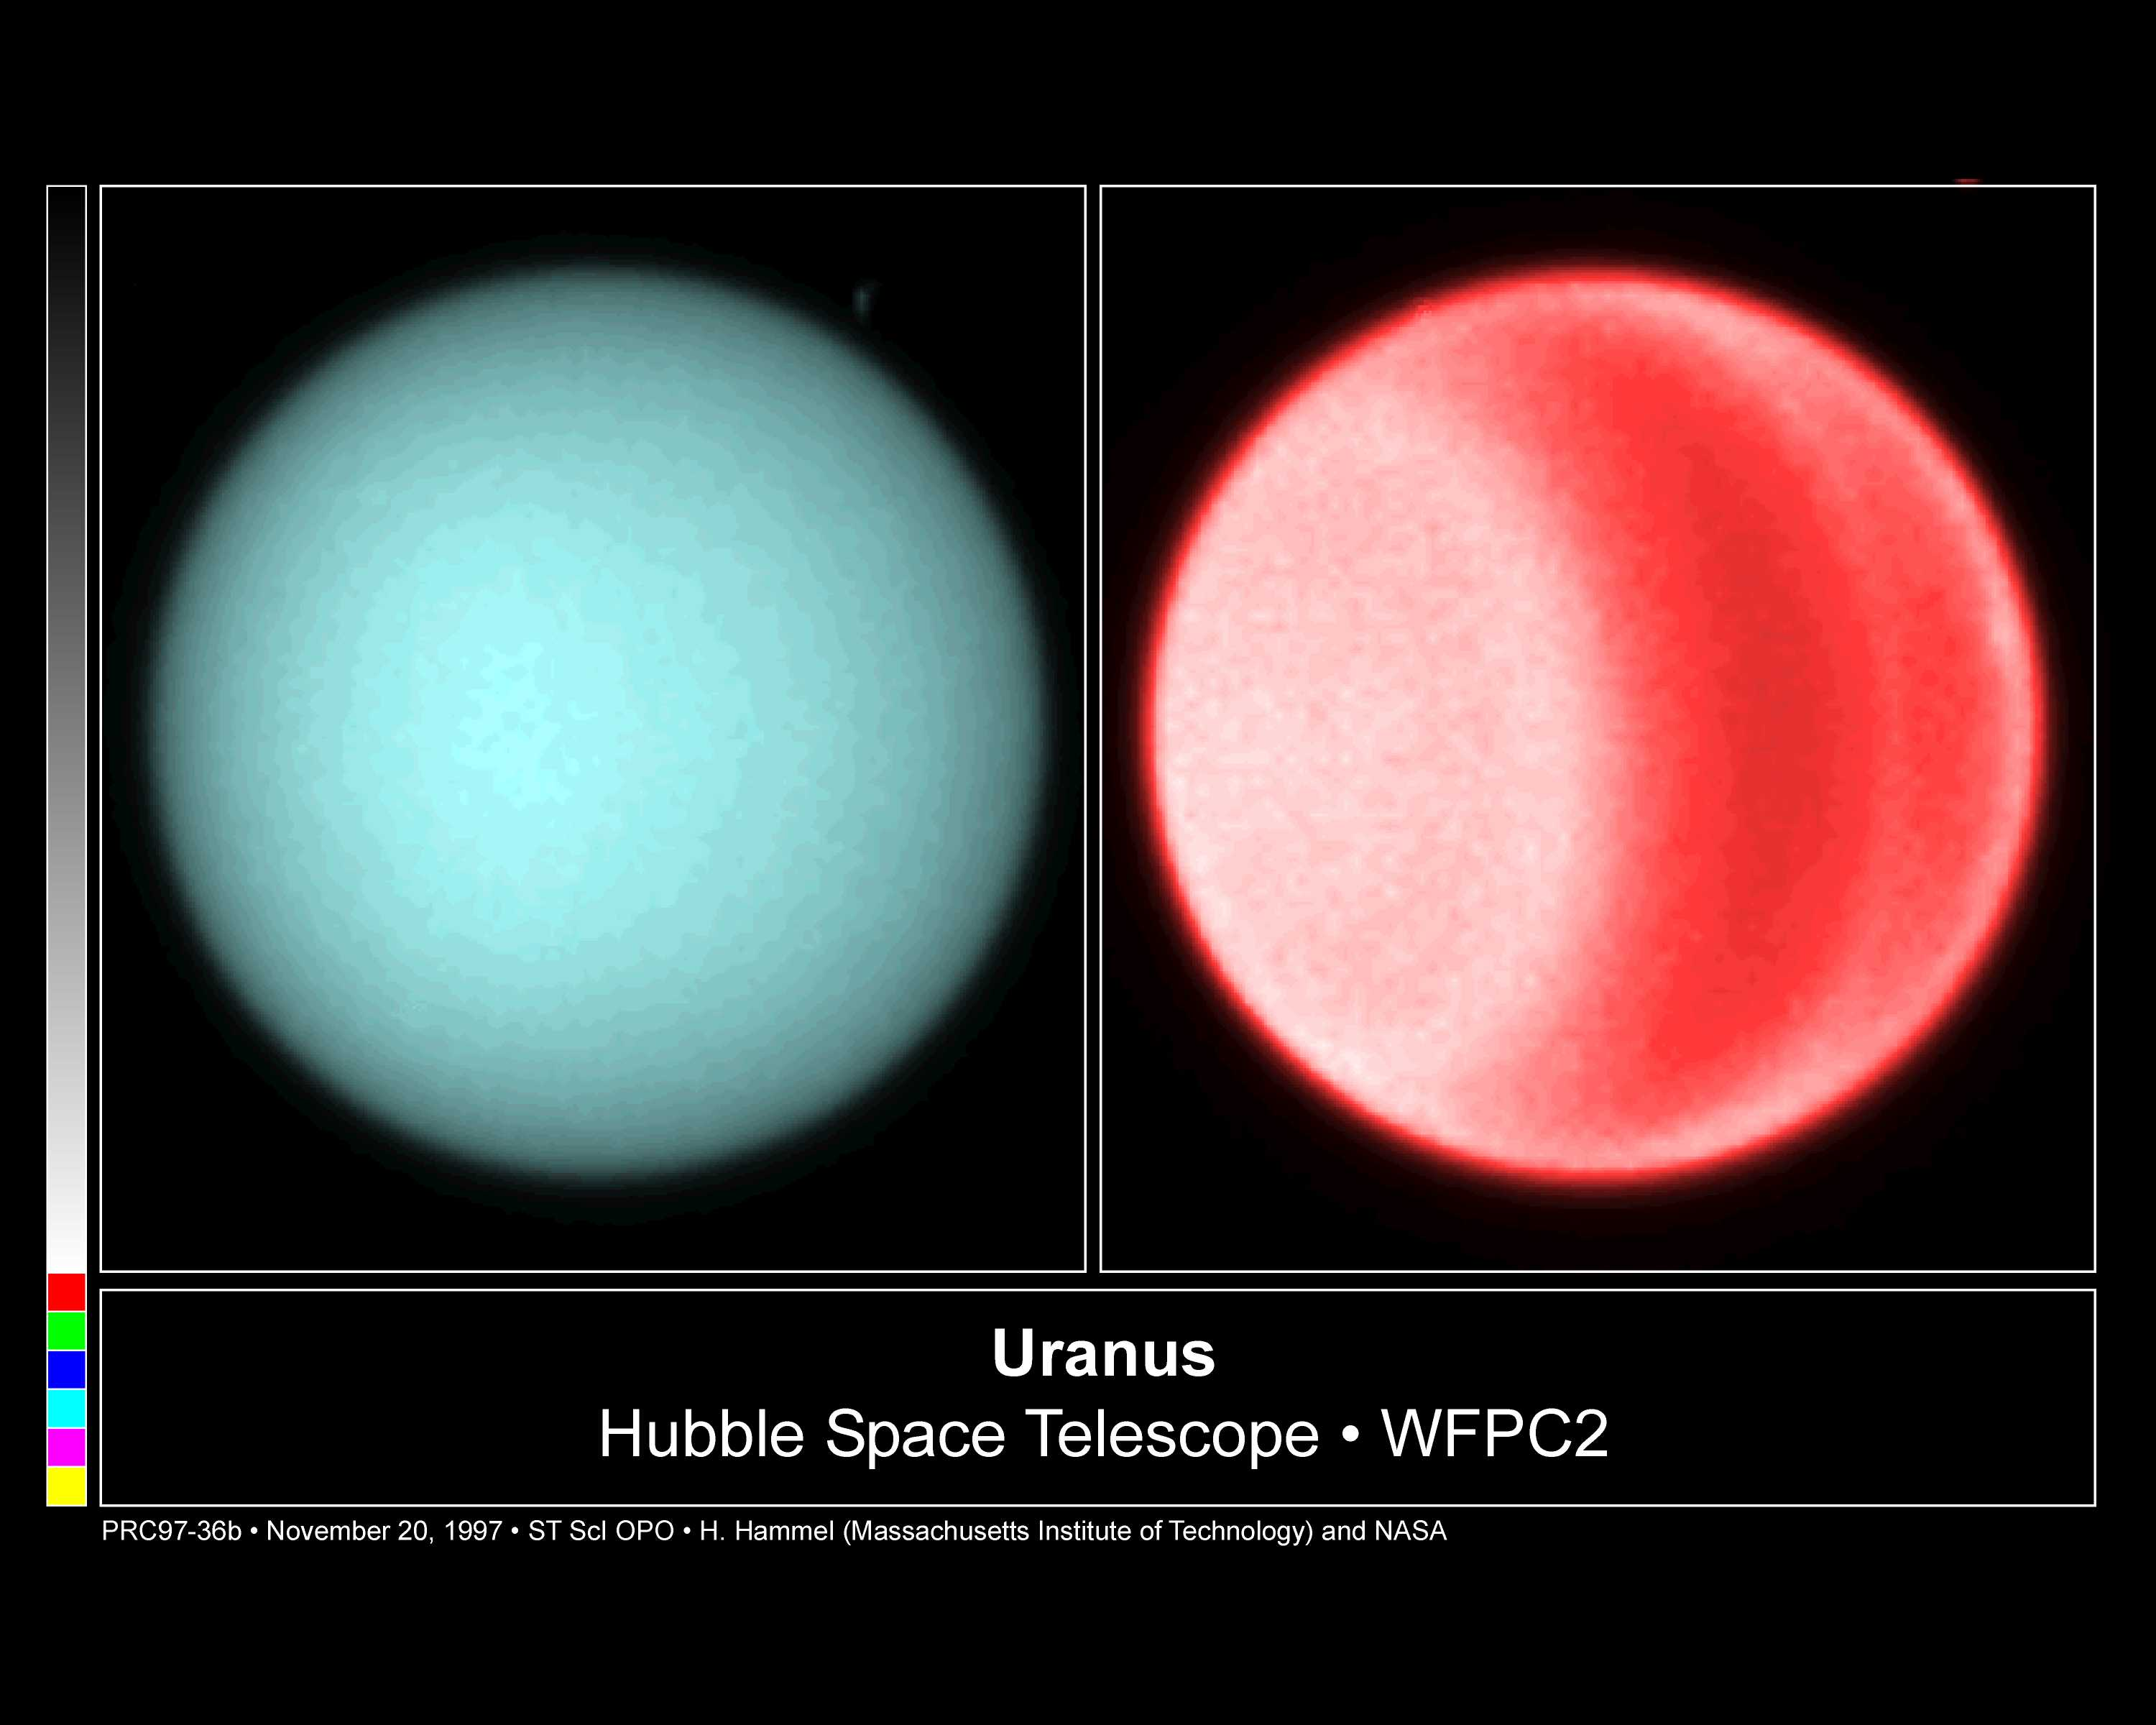

Hubble Spots Northern Hemispheric Clouds On Uranus

Using visible light, astronomers for the first time this century have detected clouds in the northern hemisphere of Uranus. The newest images, taken July 31 and Aug. 1, 1997 with NASA/ESA Hubble Space Telescope's Wide Field and Planetary Camera 2, show banded structure and multiple clouds. Using these images, Dr. Heidi Hammel (Massachusetts Institute of Technology) and colleagues Wes Lockwood (Lowell Observatory) and Kathy Rages (NASA Ames Research Center) plan to measure the wind speeds in the northern hemisphere for the first time.

Credit: Heidi Hammel (Massachusetts Institute of Technology), and NASA/ESA